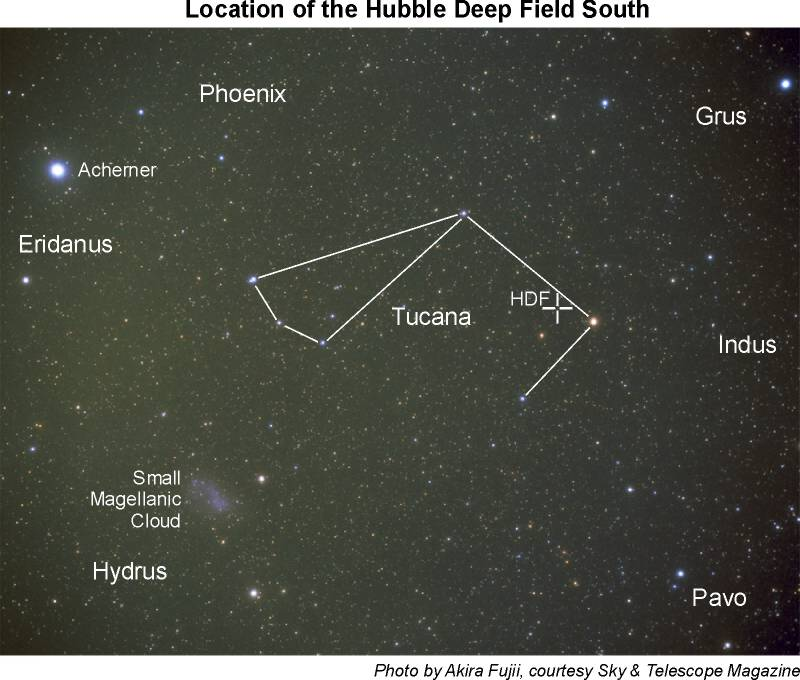

Location of the HDF south on the sky (ground-based image)

Location of the HDF South on the sky.

Credit: Akira Fujii, courtesy Sky and Telescope Magazine